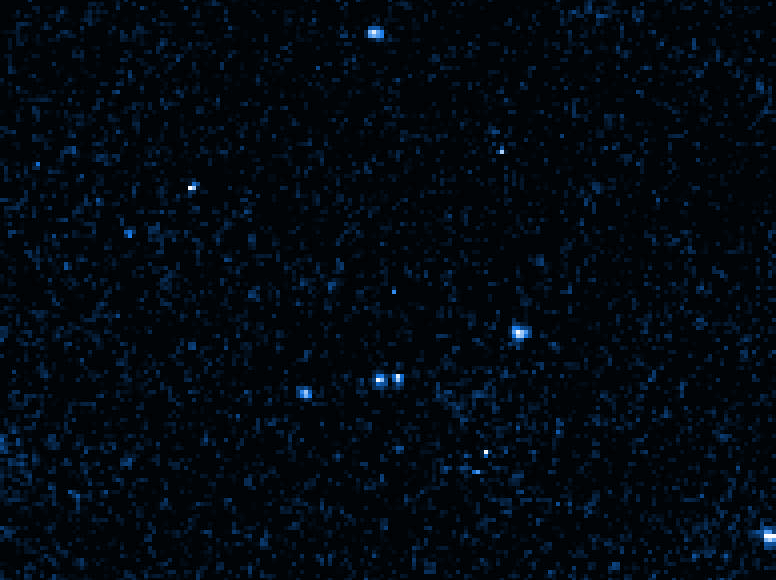

The Motion of RX J185635-3754

This photograph is the sum of three Hubble Space Telescope images. North is down, east is to the right.

All stars line up in this composite picture, except the neutron star, which moves across the image in a direction 10 degrees south of east. The three images of the neutron star are labeled by date. The proper motion is 1/3 of a second of arc per year.

Credit: F.M. Walter (State University of New York at Stony Brook) and NASA/ESA